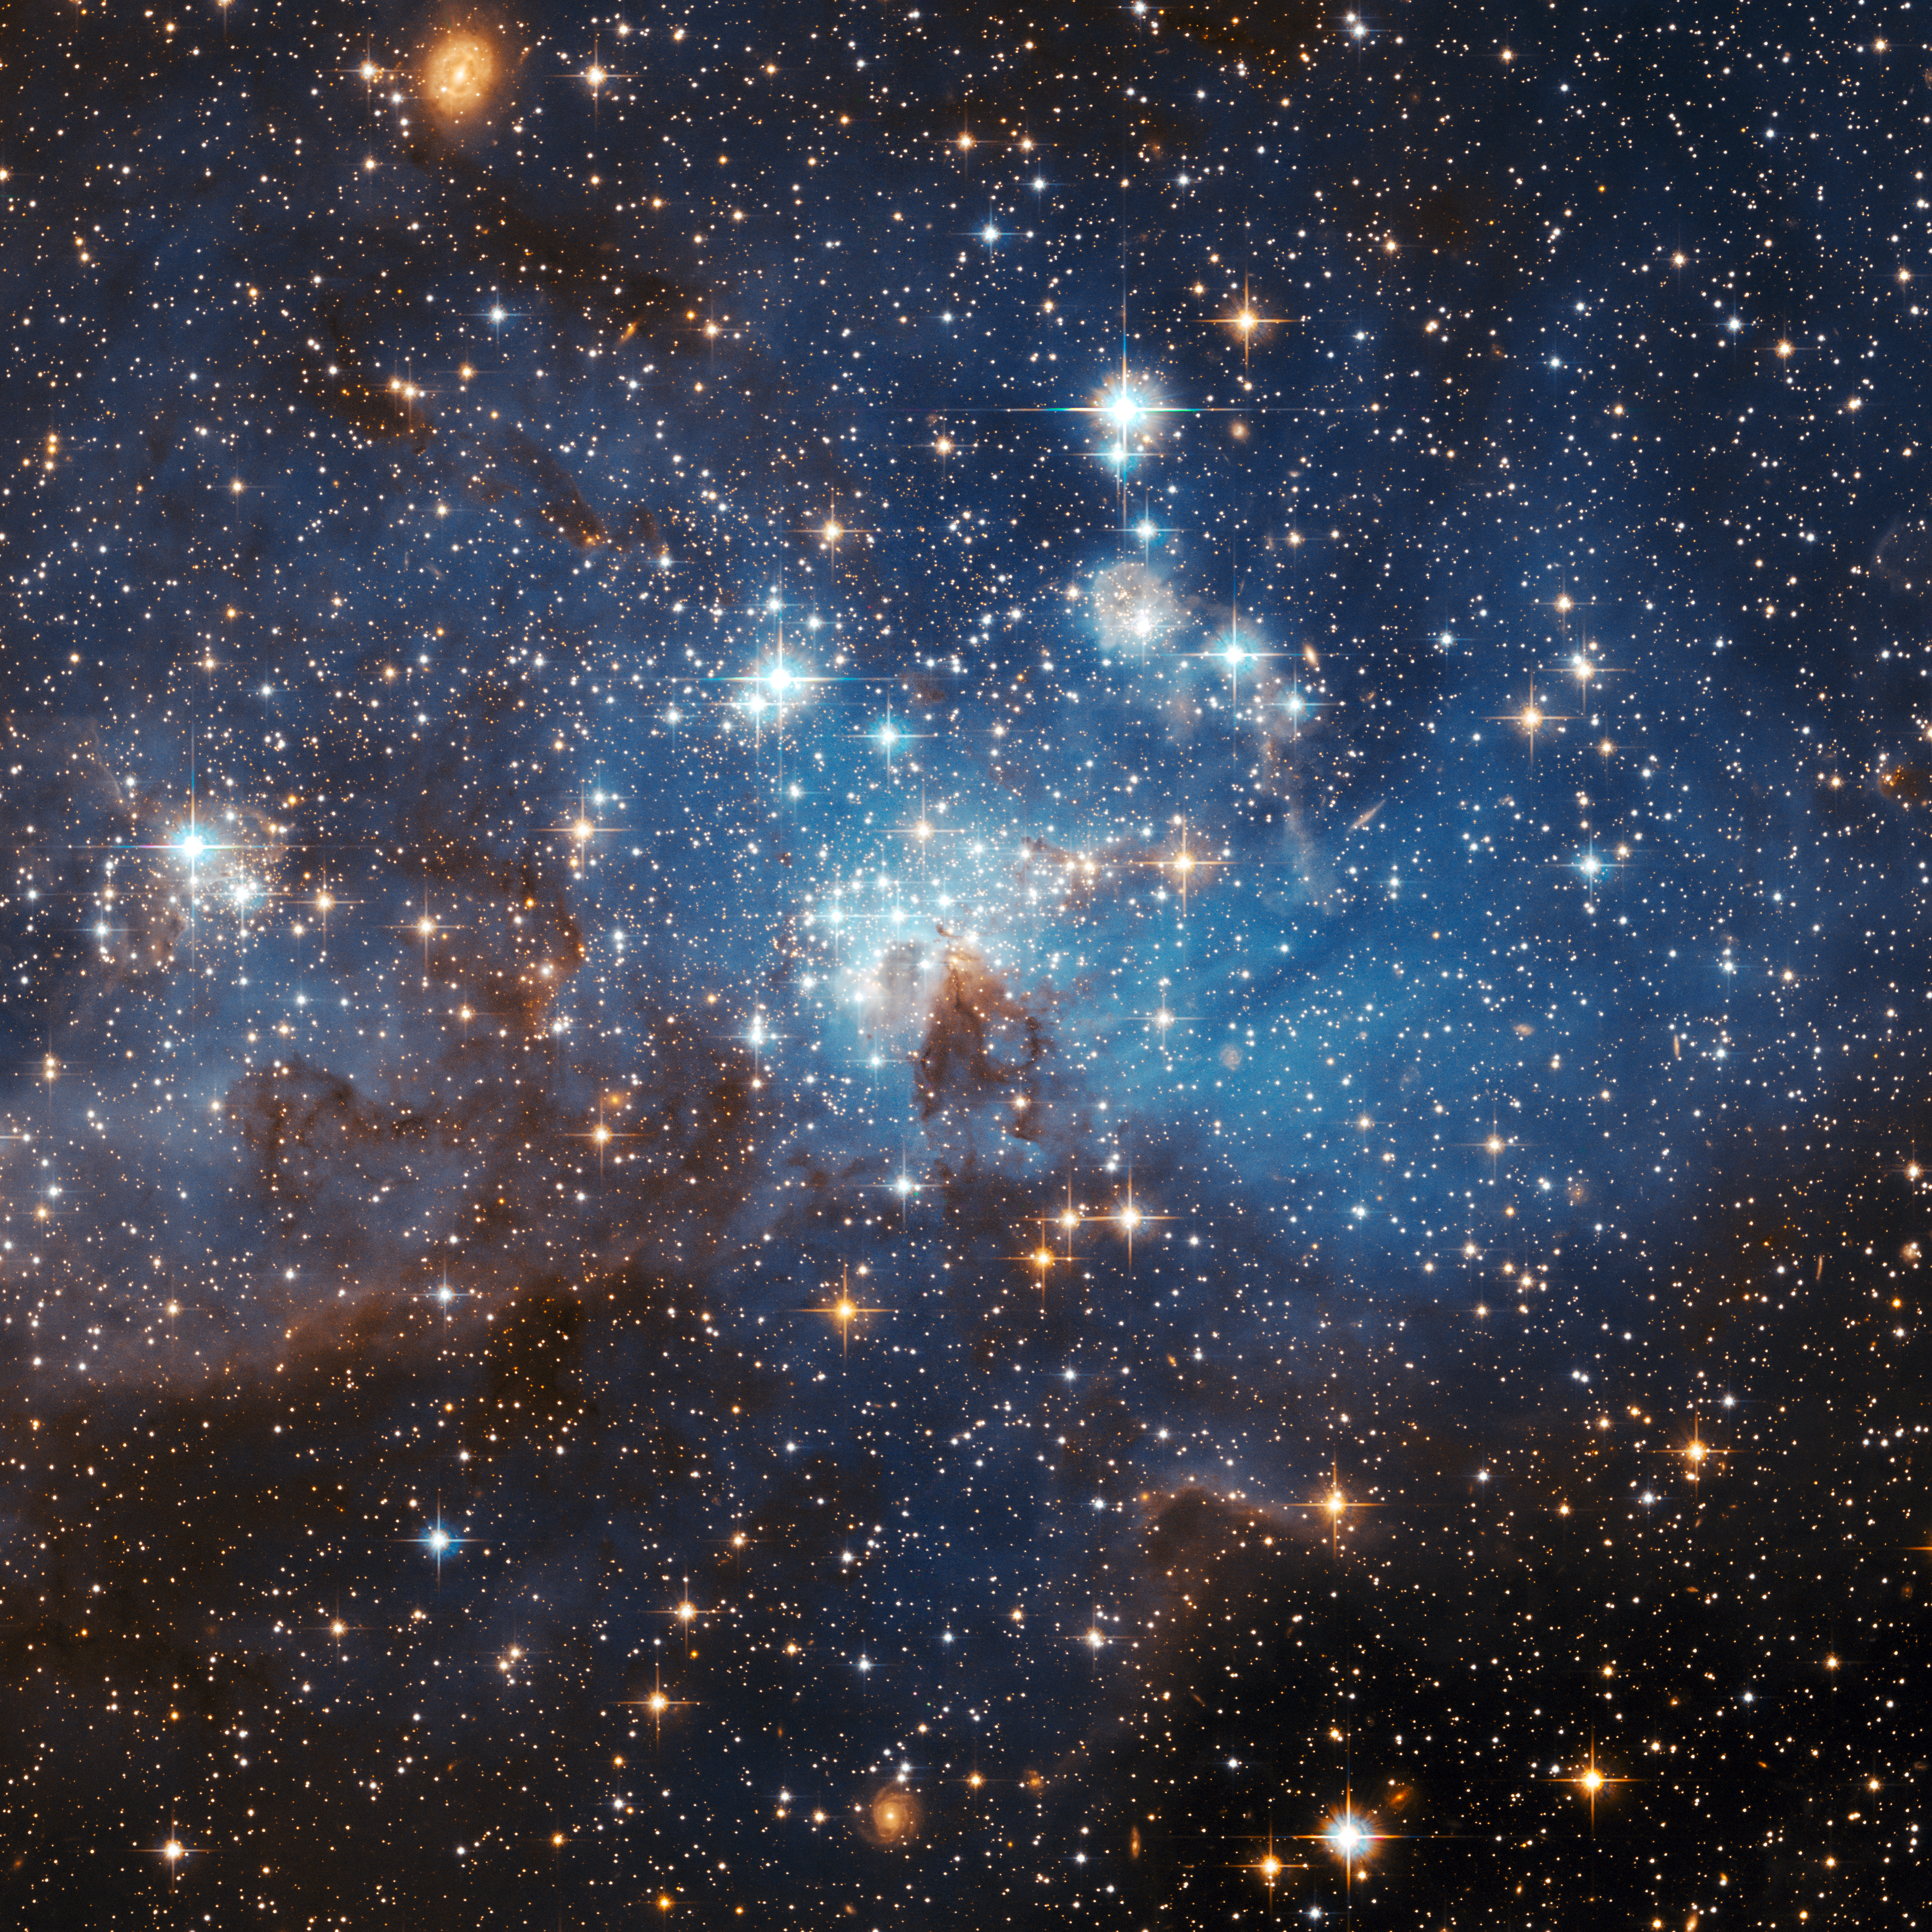

Large and small stars in harmonious coexistence

The latest photo from the Hubble Space Telescope, presented at the 2006 General Assembly of the International Astronomical Union in Prague this week, shows a star forming region in the Large Magellanic Cloud (LMC). This sharp image reveals a large number of low-mass infant stars coexisting with young massive stars.

Credit: NASA, ESA